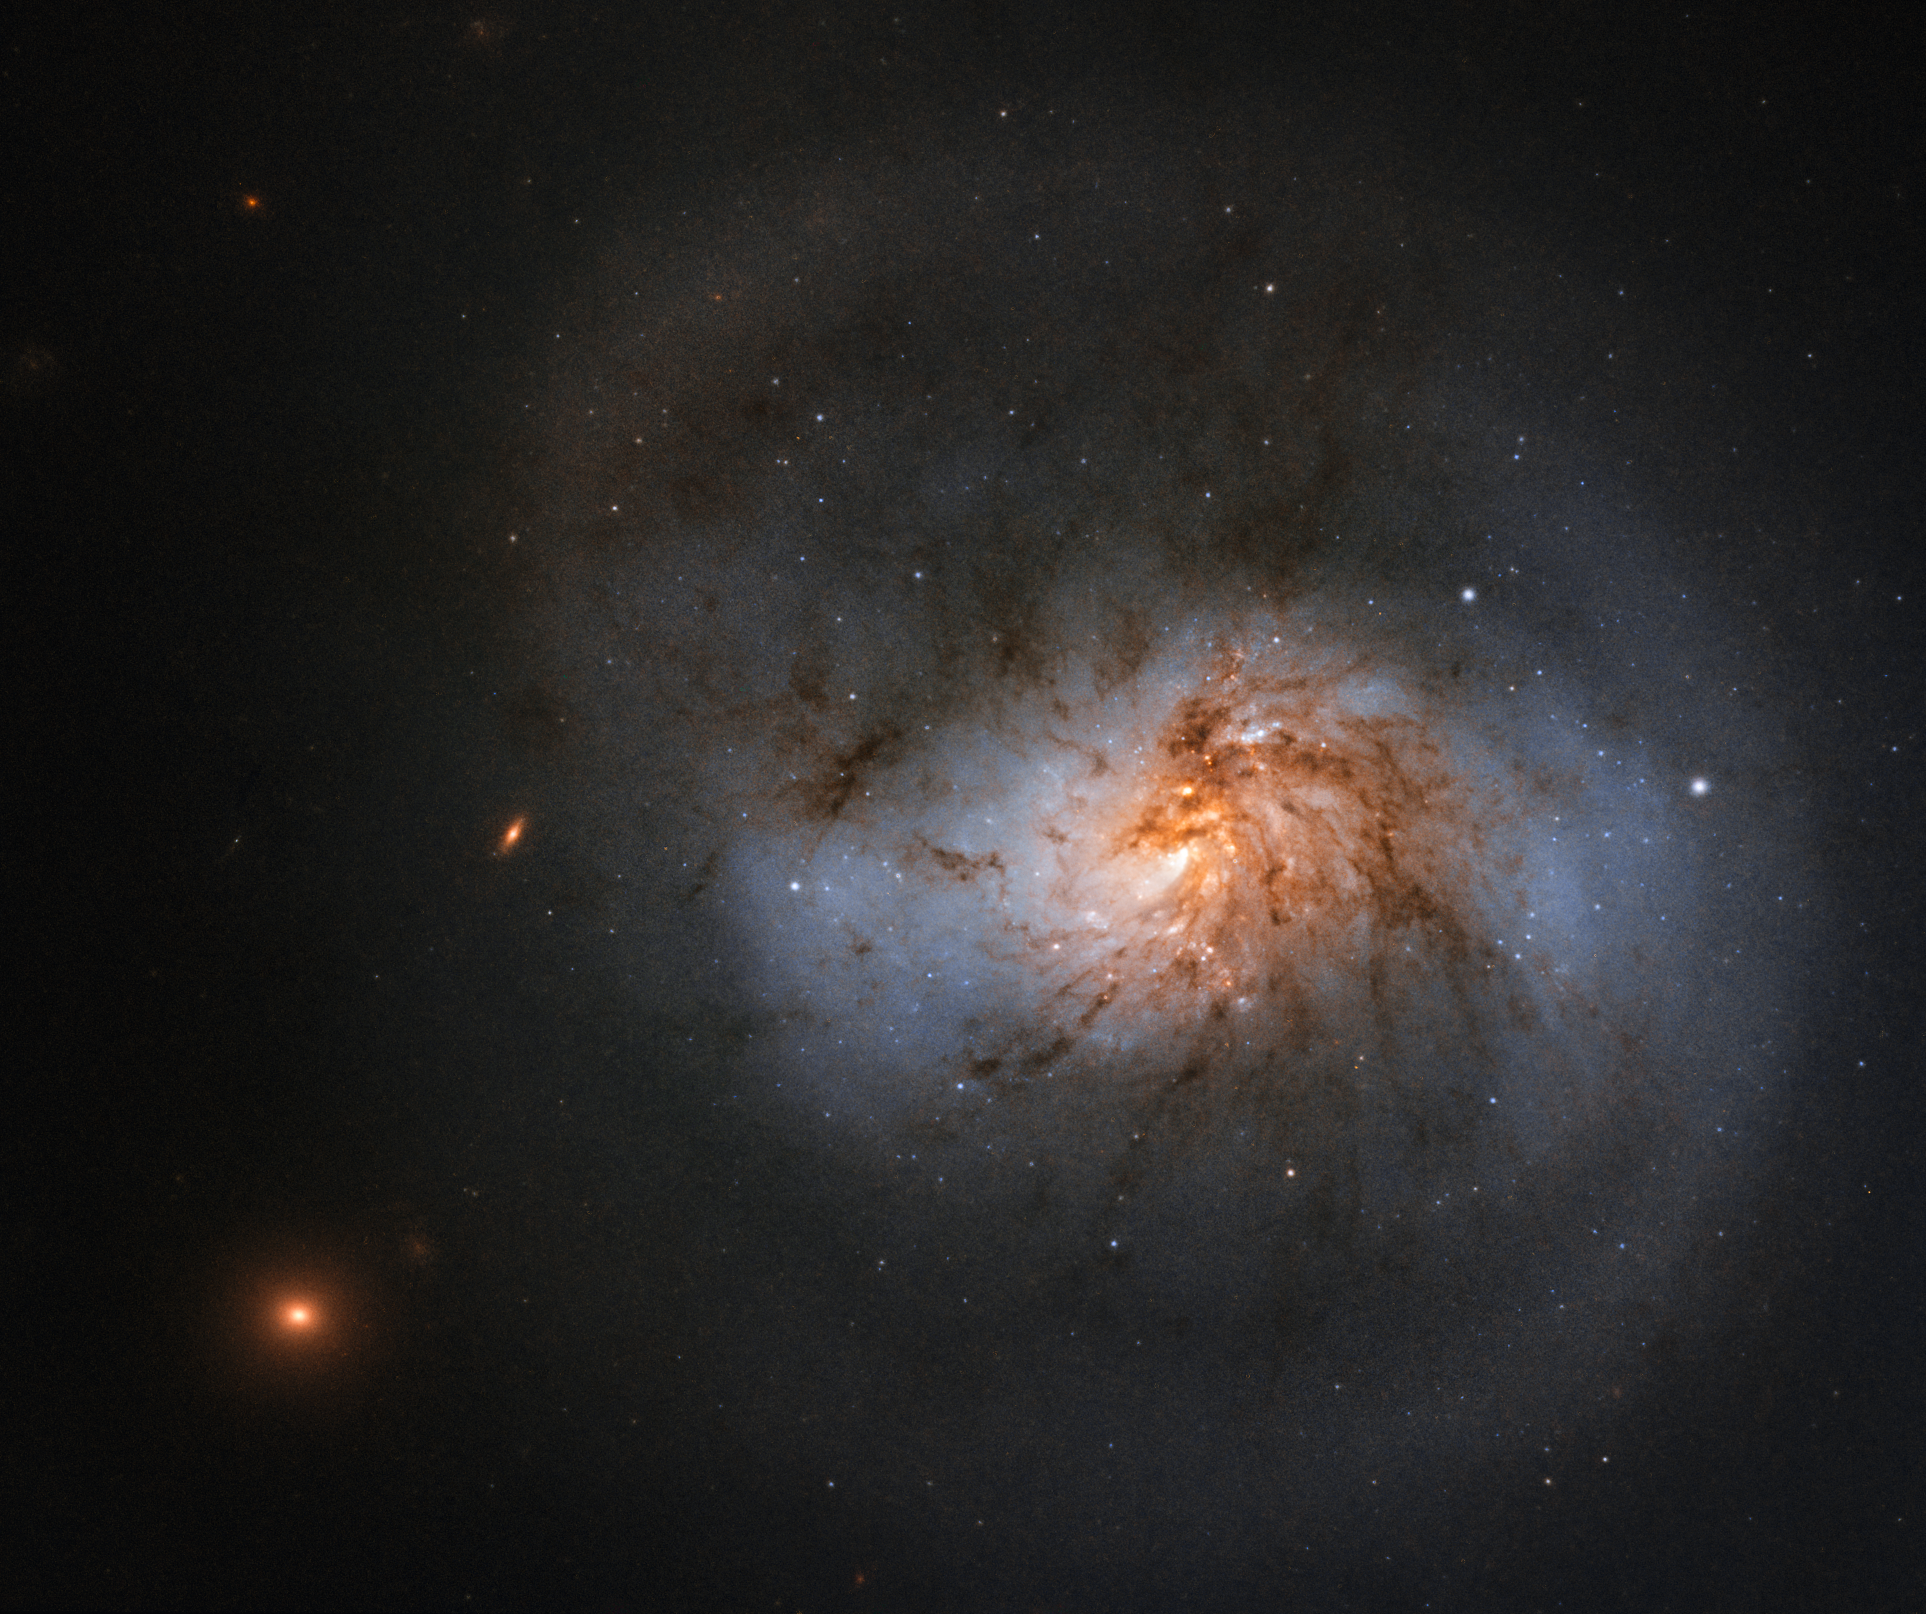

Supermassive Influence

This peculiar galaxy, beautifully streaked with tendrils of reddish dust, is captured here in wonderful detail by the NASA/ESA Hubble Space Telescope.

The galaxy is known as NGC 1022, and is officially classified as a barred spiral galaxy. You can just about make out the bar of stars in the centre of the galaxy in this image, with swirling arms emerging from its ends. This bar is much less prominent than in some of the galaxy’s barred cousins and gives the galaxy a rather squat appearance; but the lanes of dust that swirl throughout its disc ensure it is no less beautiful.

Hubble observed this image as part of a study into one of the Universe’s most notorious residents: black holes. These are fundamental components of galaxies, and are thought to lurk at the hearts of many — if not all — spirals. In fact, they may have quite a large influence over their cosmic homes. Studies suggest that the mass of the black hole sitting at a galaxy’s centre is linked with the larger-scale properties of the galaxy itself. However, in order to learn more, we need observational data of a wider and more diverse range of galaxies — something Hubble’s study aims to provide.

Credit: ESA/Hubble & NASA, A. Seth